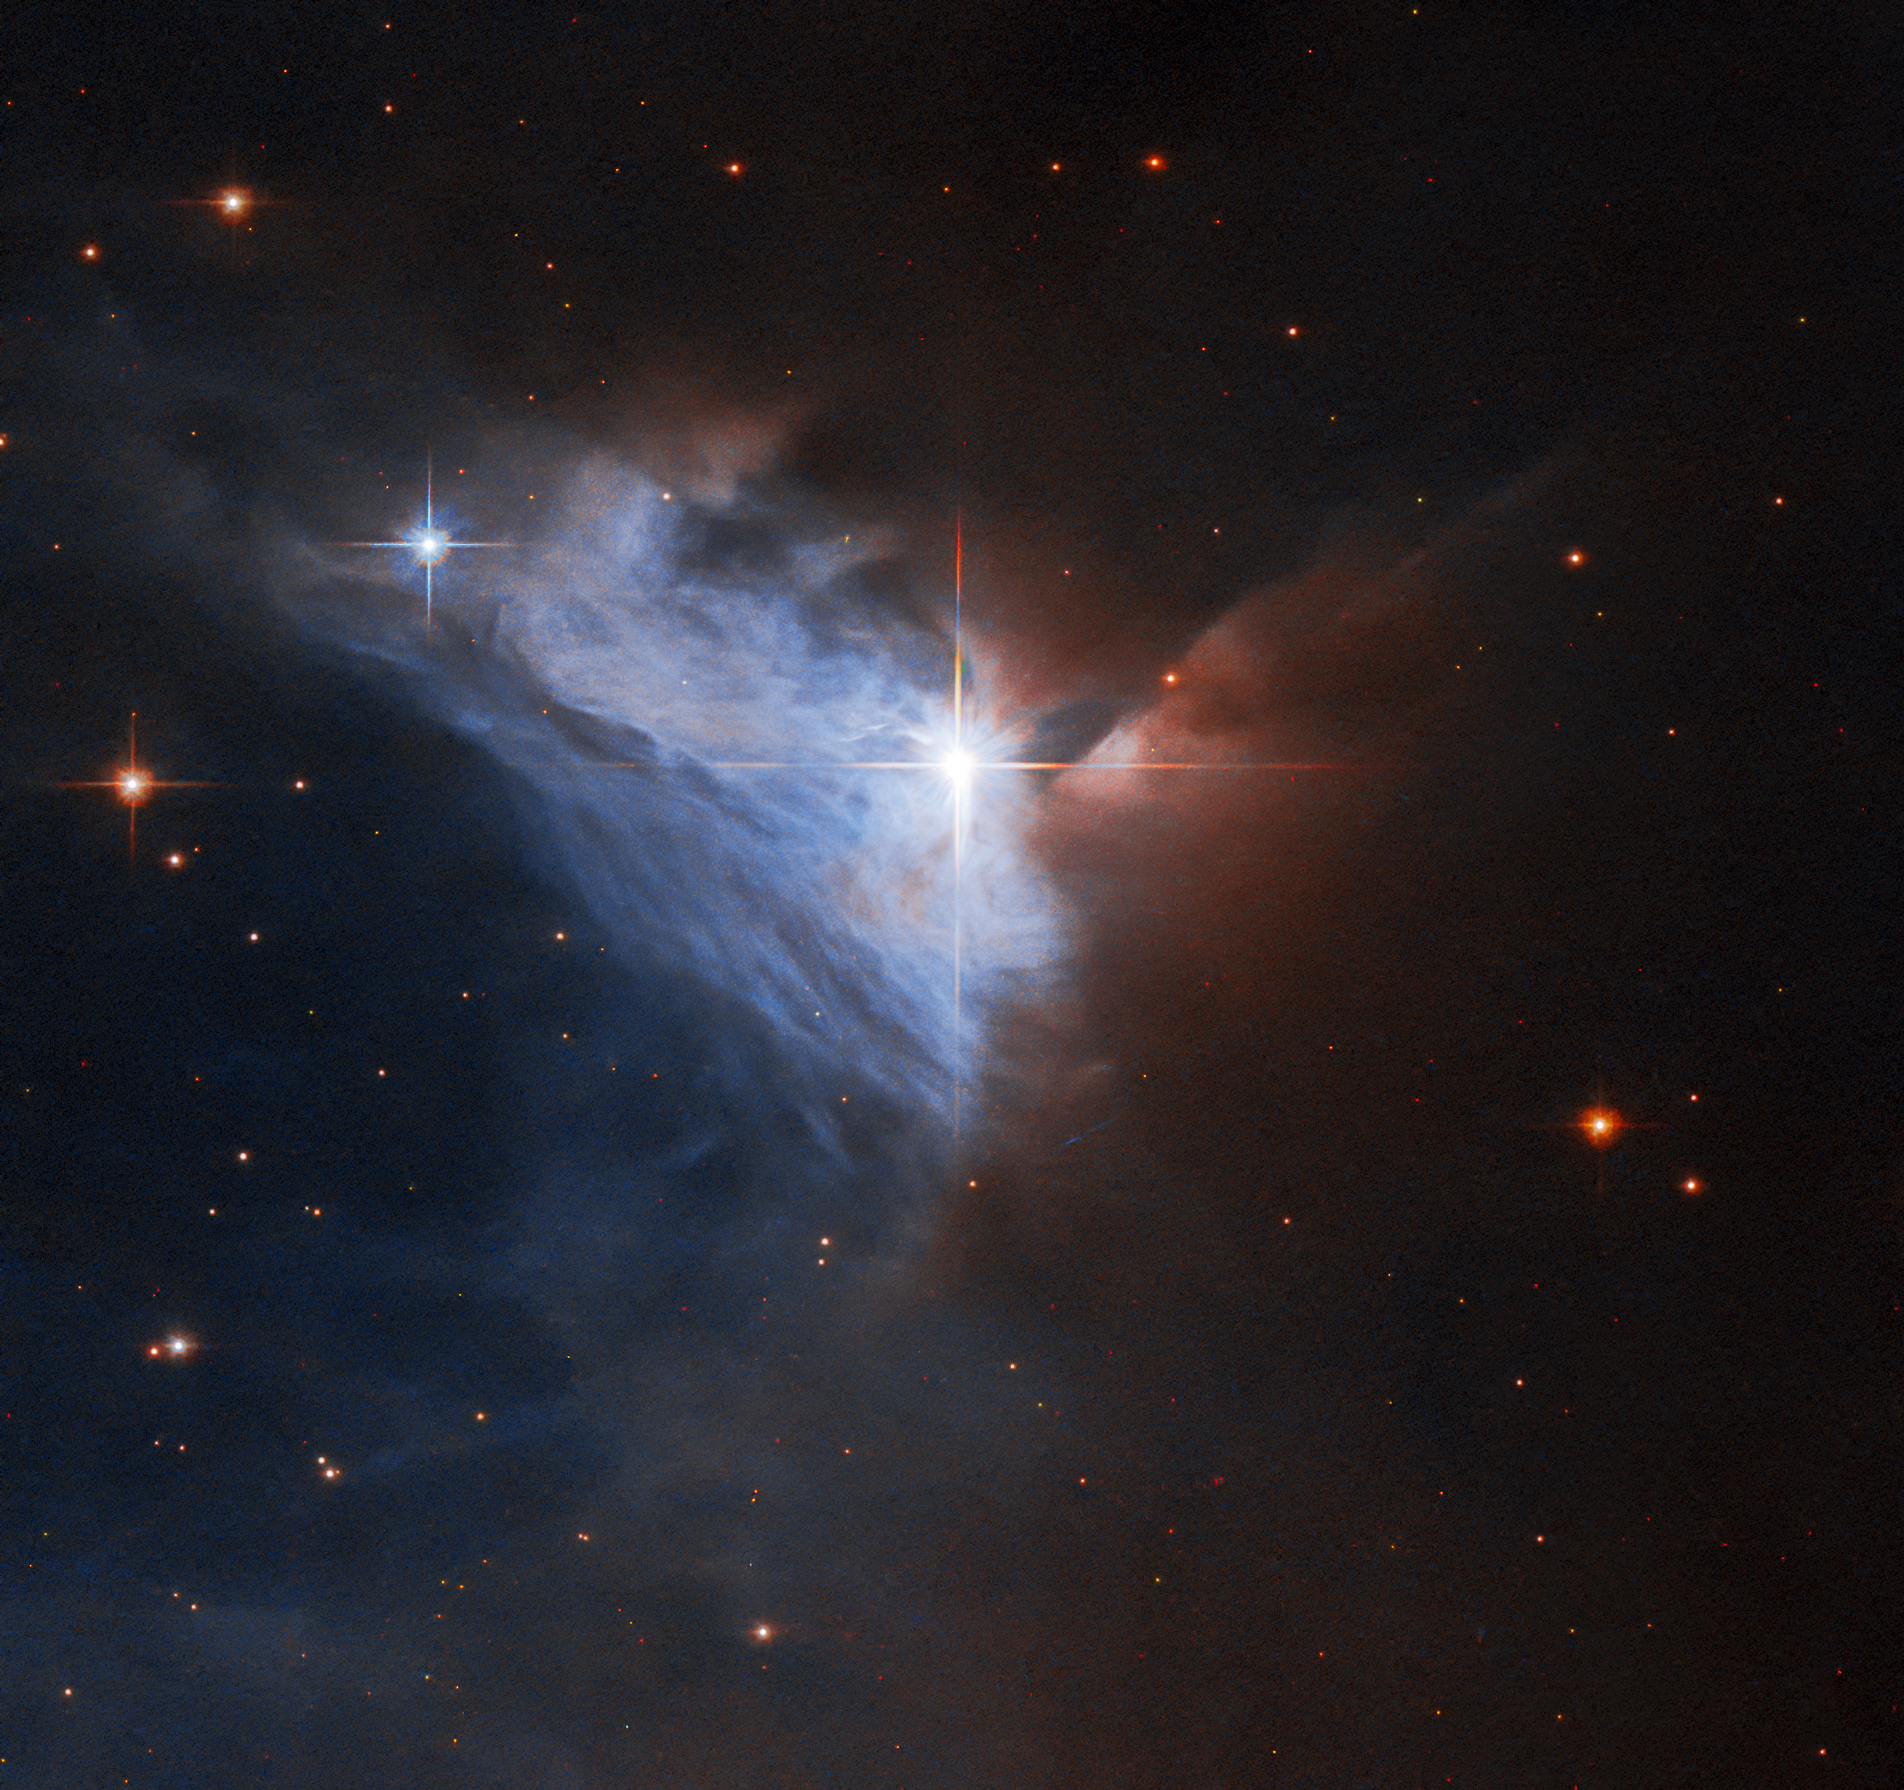

Cosmic Silver Lining

This Picture of the Week showcases the emission nebula NGC 2313. The bright star V565 — surrounded by four prominent diffraction spikes — illuminates a silvery, fan-shaped veil of gas and dust, while the right half of this image is obscured by a dense cloud of dust. Nebulae with similar shapes — a star accompanied by a bright fan of gas — were once referred to as cometary nebulae, though the name is no longer used.

The language that astronomers use changes as we become better acquainted with the Universe, and astronomical history is littered with now-obsolete phrases to describe objects in the night sky, such as “spiral nebulae” for spiral galaxies or “inferior planets” for Mercury and Venus.

Credit: ESA/Hubble, R. Sahai